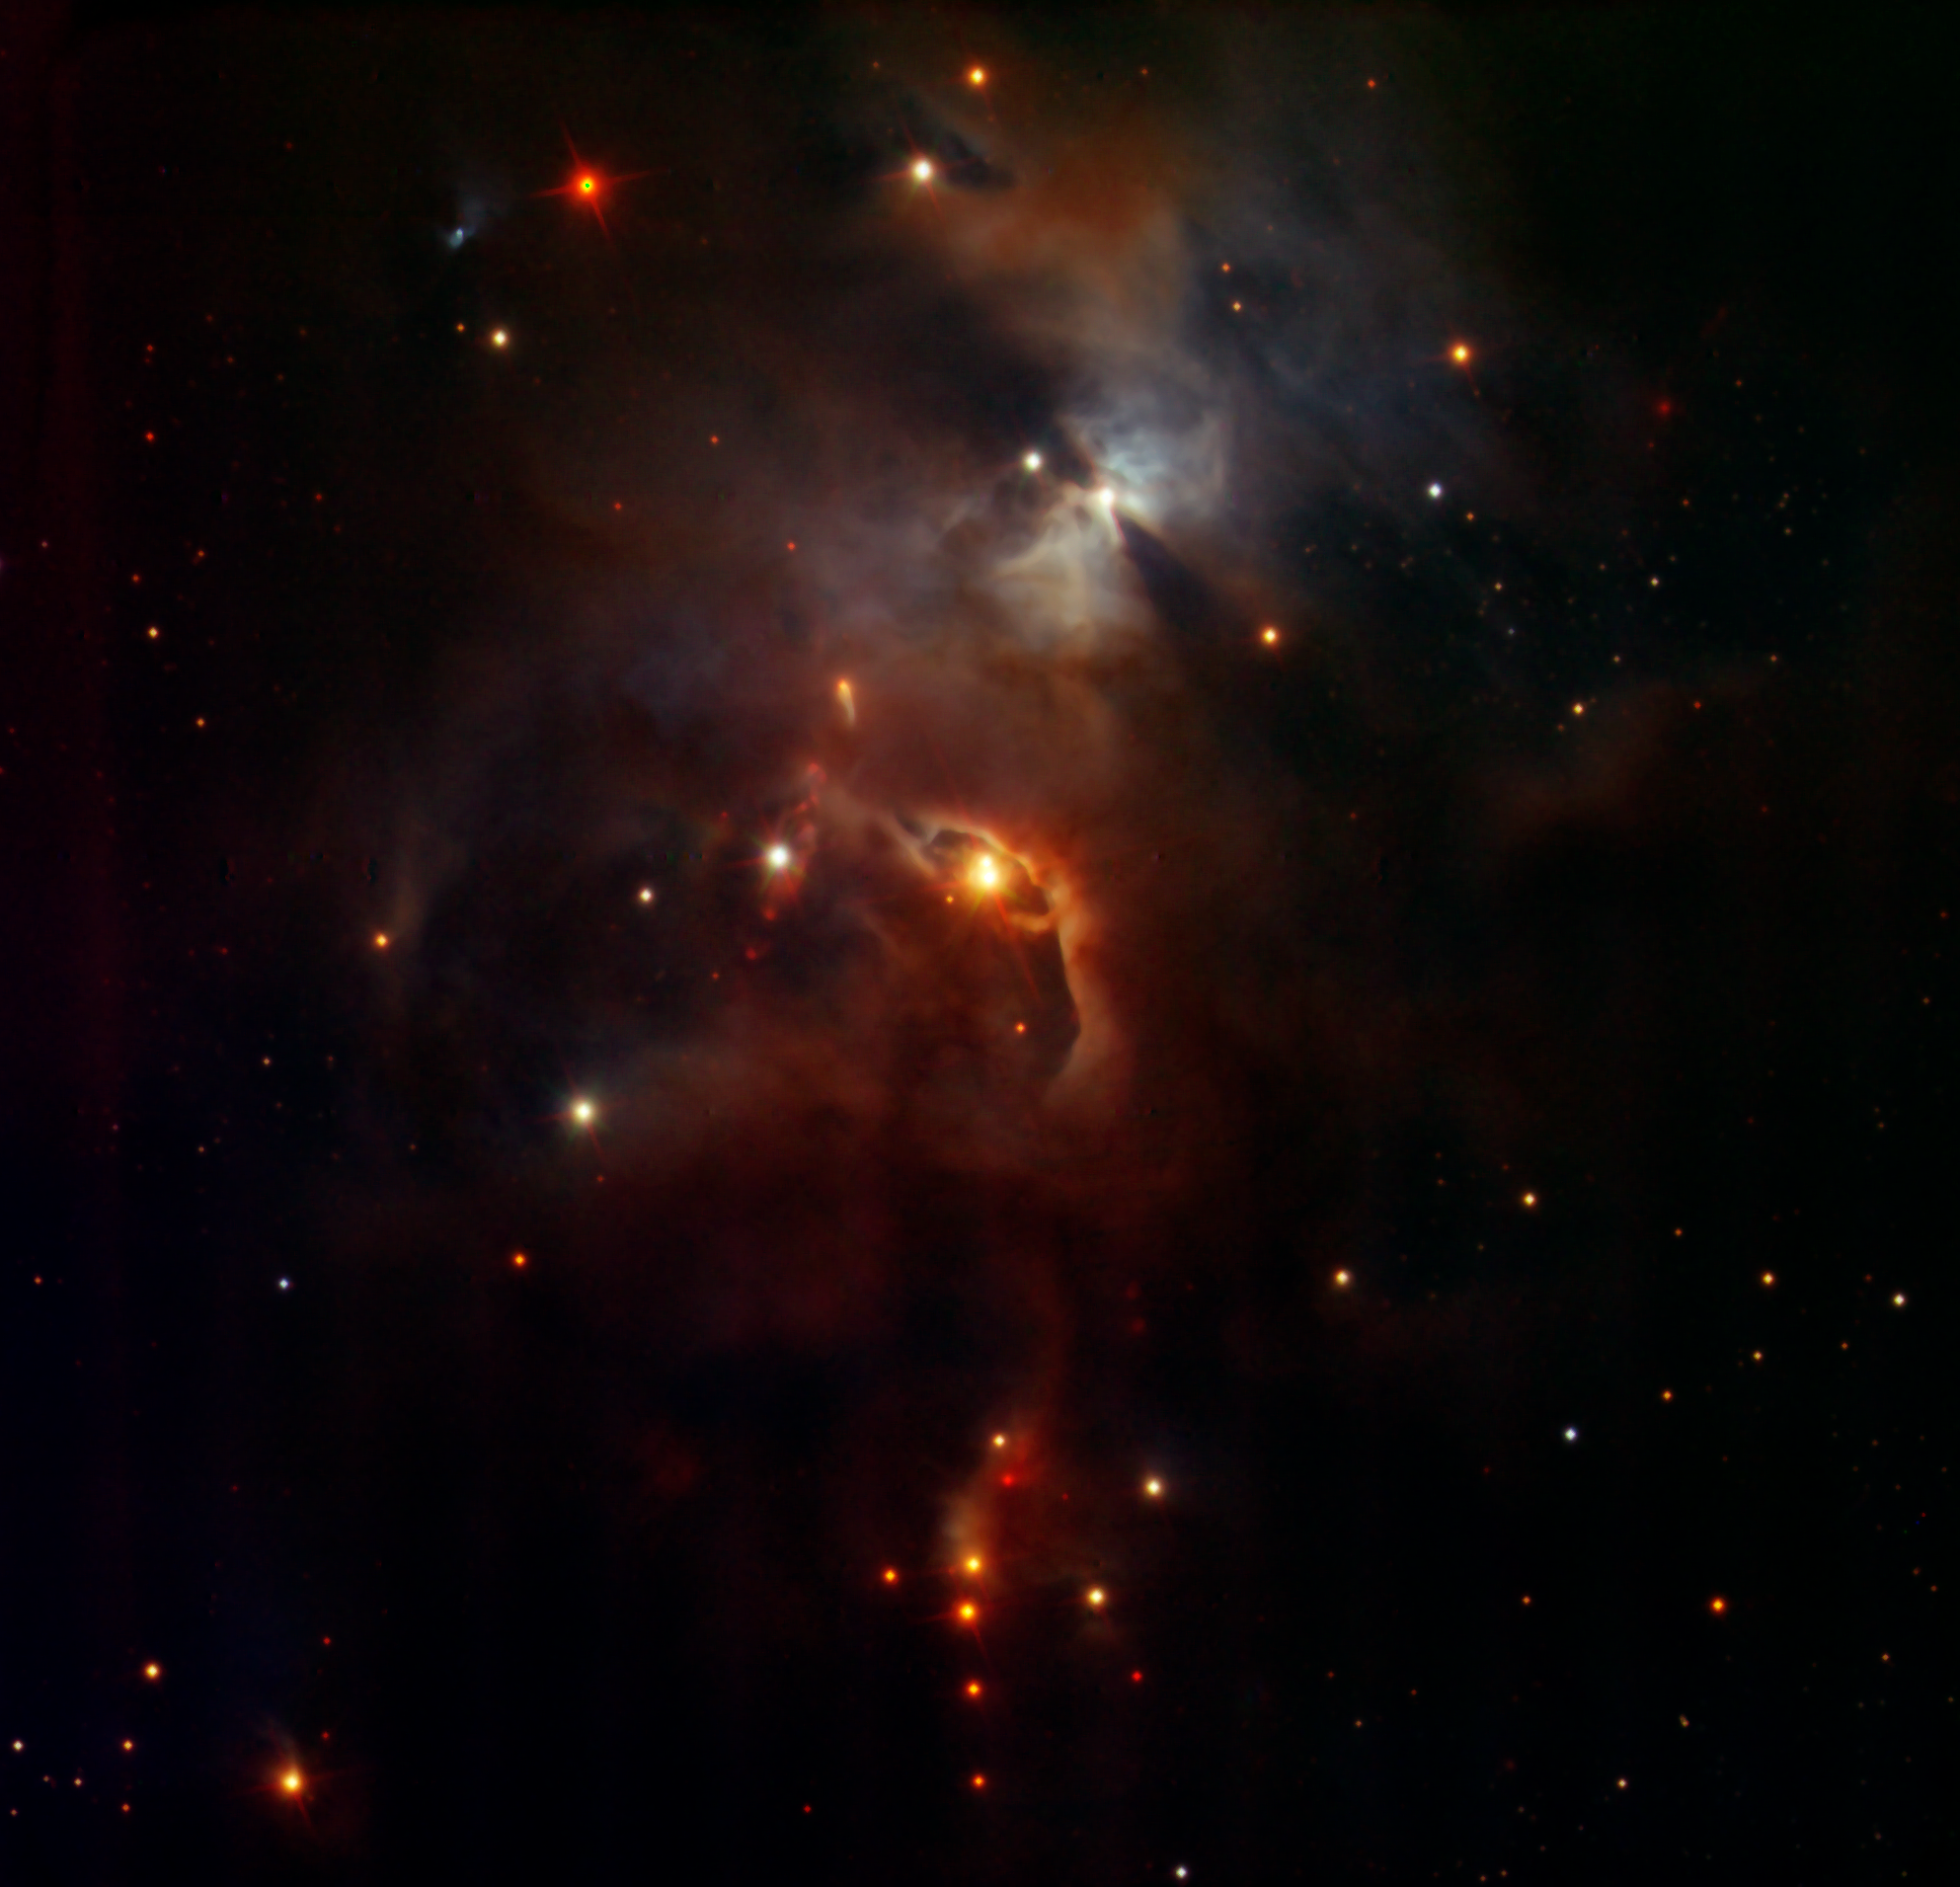

Serpens Nebula, seen by HAWK-I

This image shows the Serpens Nebula as seen by the HAWK-I instrument installed on the Very Large Telescope of the European Southern Observatory. The filters used by HAWK-I to create this image cover wavelengths similar to the filters used by Hubble.

Credit: ESO